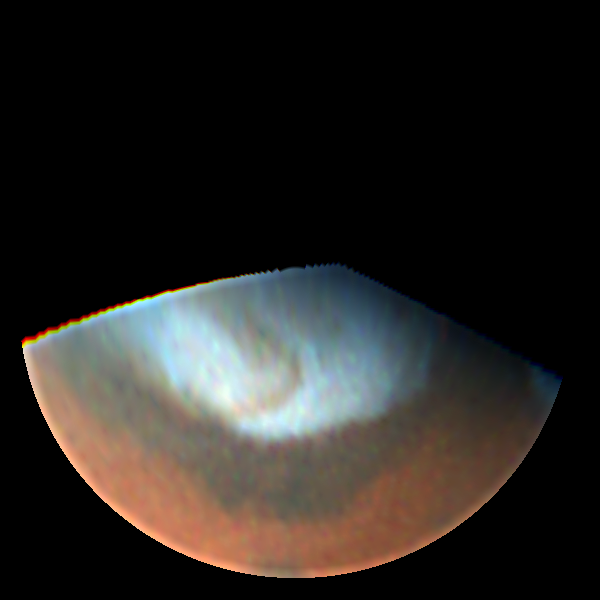

Dust Storms on Mars (October 15th 1996)

Though the storm has dissipated by October, a distinctive dust-colored comma-shaped feature can be seen curving across the ice cap.

The shape is similar to cold fronts on Earth, which are associated with low pressure systems. Nothing quite like this feature has been seen previously either in ground-based or spacecraft observation.

Credit: Phil James (University of Toledo), Steve Lee (University of Colorado) and NASA/ESA